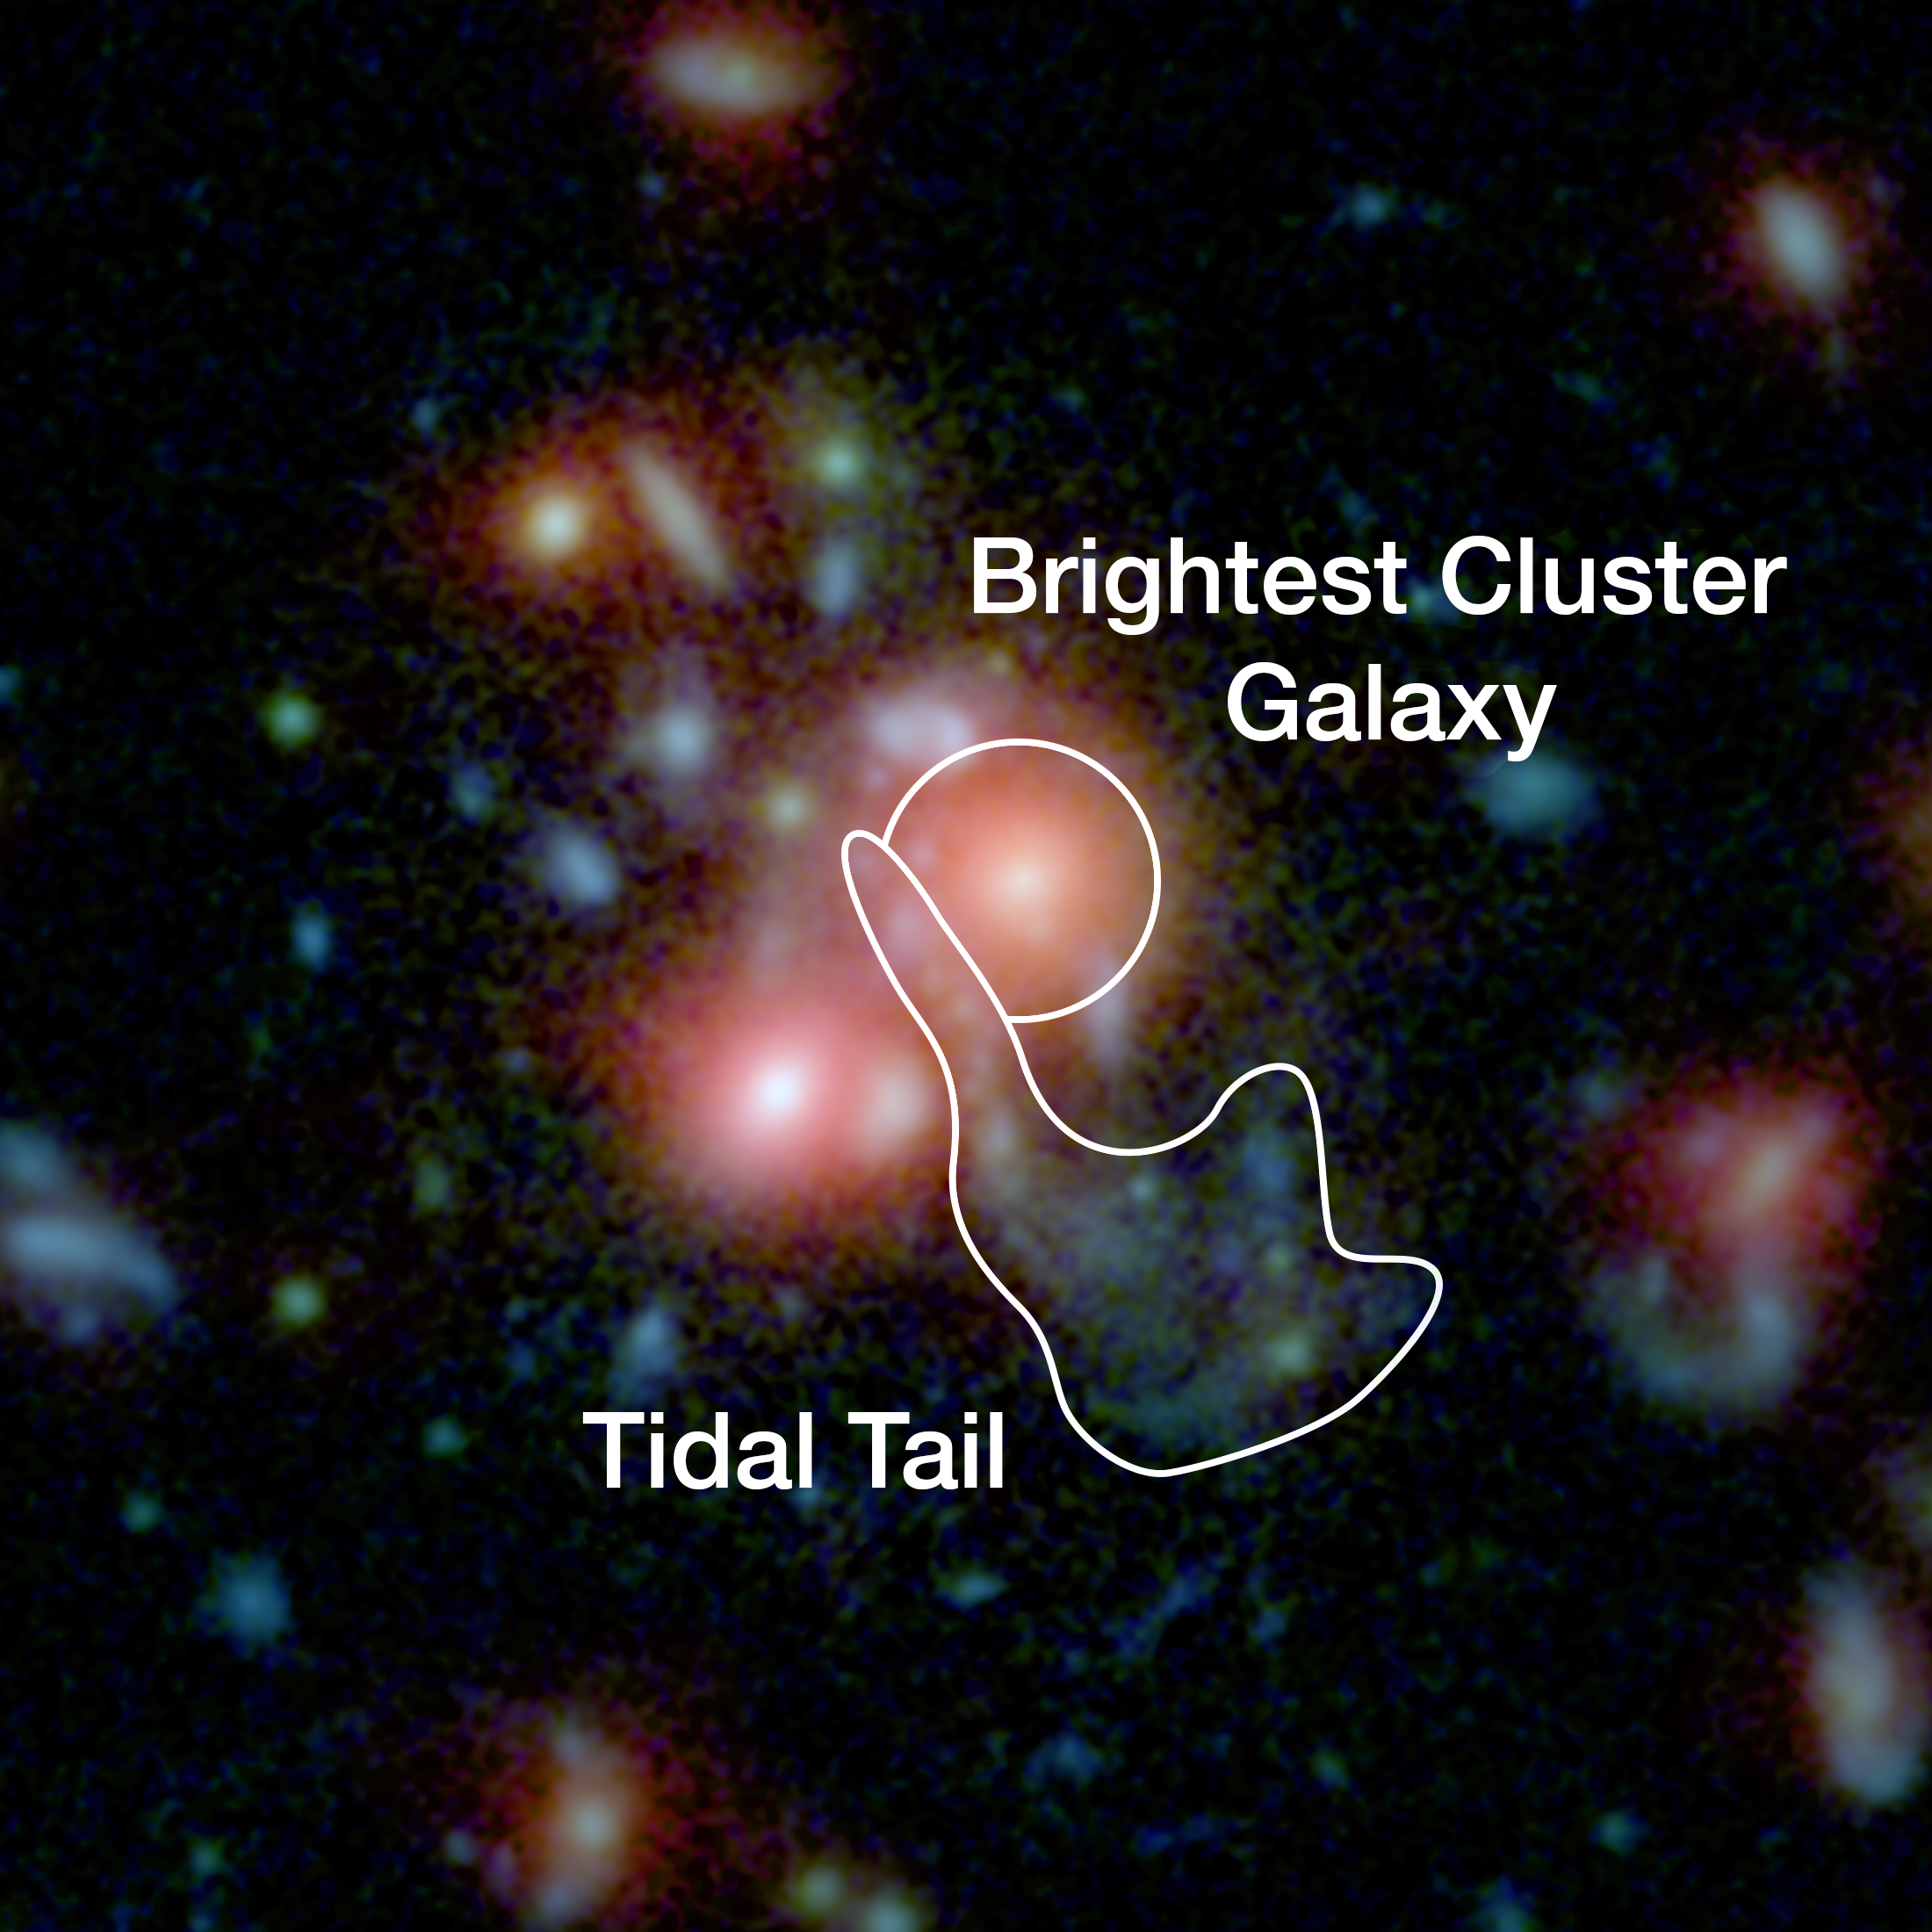

Image of the central region of SpARCS1049

This image, using data from Spitzer and the Hubble Space Telescope, shows the central region of the galaxy cluster SpARCS1049. The brightest cluster galaxy in the center of the cluster is currently undergoing a wet merger which produces enormous amounts of new stars. The tidal tail — an indicator of the merger — as well as the brightest cluster galaxy itself are shown.

Credit: NASA/STScI/ESA/JPL-Caltech/McGill